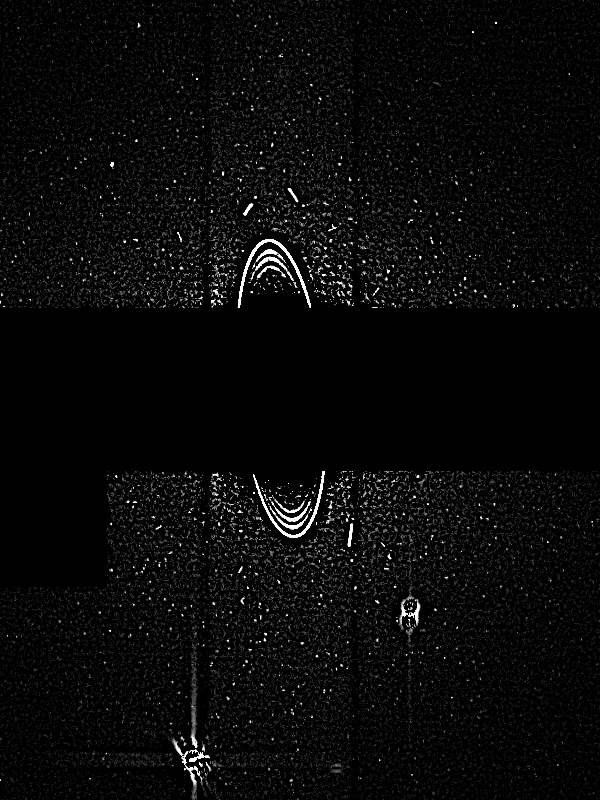

Uranus: Rings, Satellites 19:18 UT

Astronomers have discovered two of the smallest moons yet found around Uranus. The new moons, uncovered by NASA's Hubble Space Telescope, are about 8 to 10 miles across (12 to 16 km) — about the size of San Francisco. The two moons are so faint they eluded detection by the Voyager 2 spacecraft, which discovered 10 small satellites when it flew by the gas giant planet in 1986.

Credit: NASA/ESA, M. Showalter (Stanford University/NASA/ESA Ames Research Center), J. Lissauer (NASA/ESA Ames Research Center)